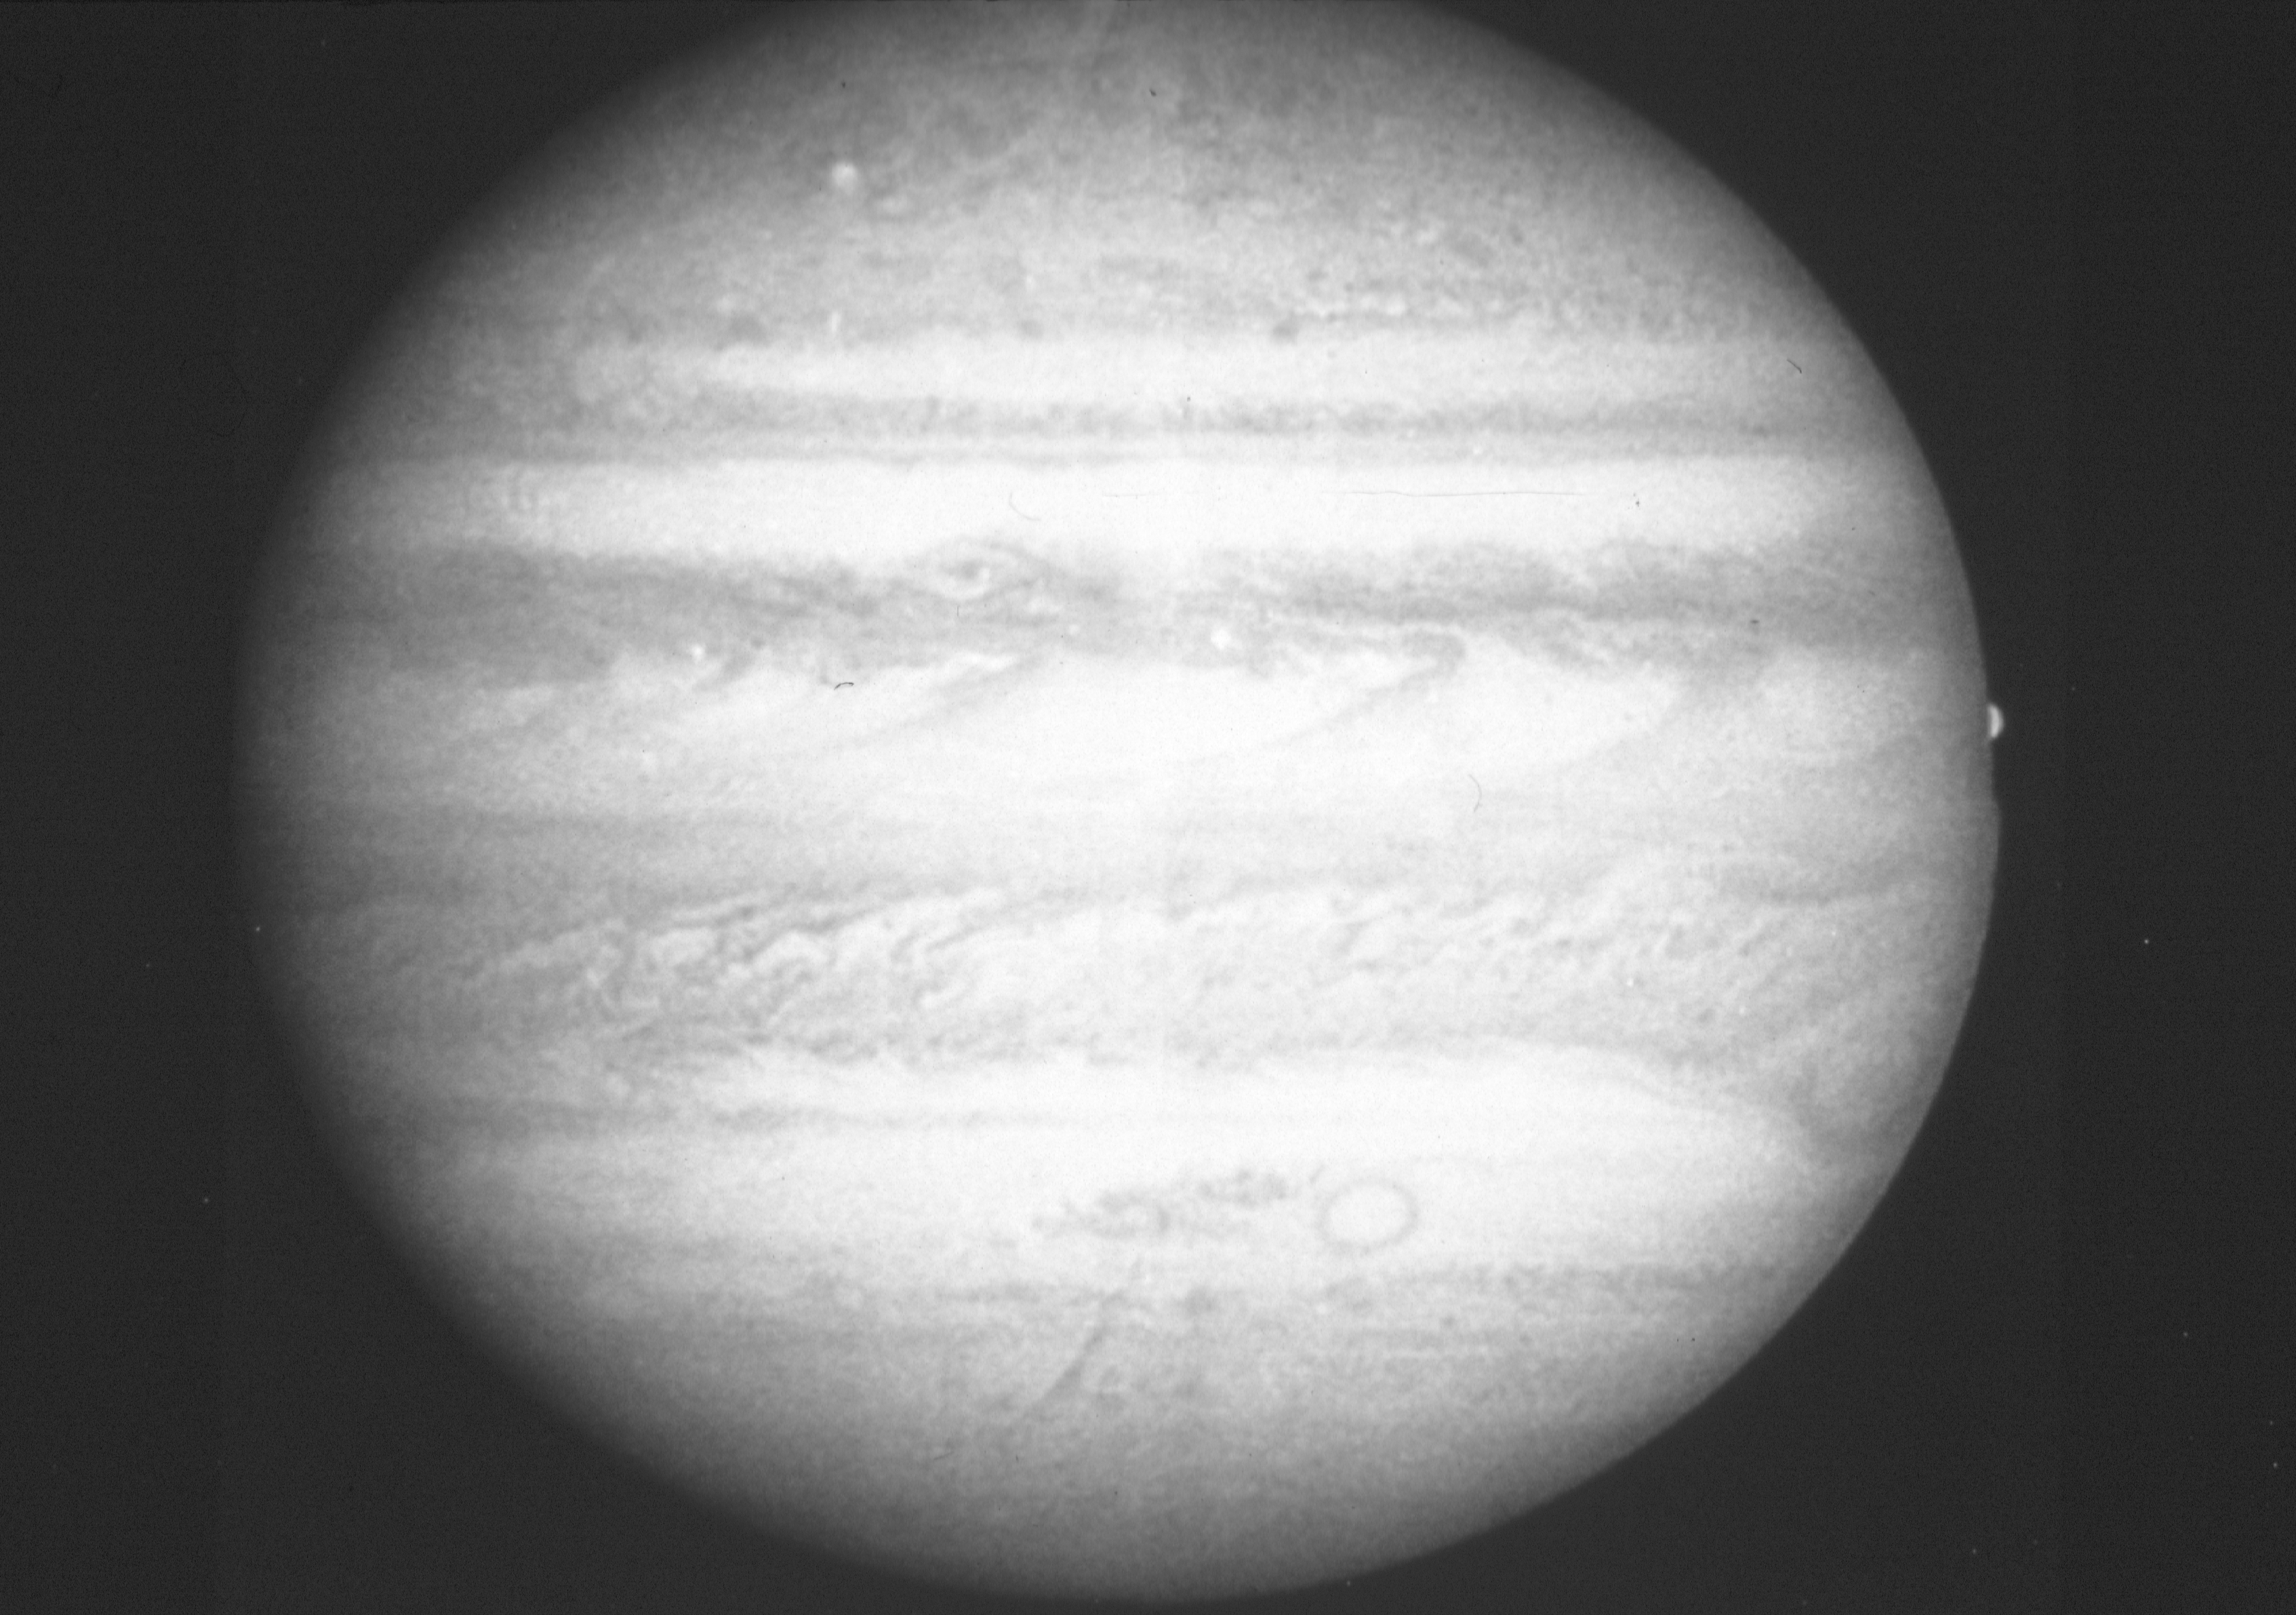

Jupiter

This black and white picture of Jupiter, taken in green light at 1:14 a.m. on the 11th March, 1991 by the Planetary Camera on NASA/ESA Hubble Space Telescope, shows a wealth of fine detail in the clouds that cover the planet. The Great Red Spot is seen at the lower right, also on the right near the equator the satellite Europa is disappearing behind the limb of the planet. The dark 'j' shaped clouds along the equator are the result of a pattern of intense jet streams in the Jovian atmosphere. This picture is as sharp as the Voyager pictures taken five days before the closest approach in 1979.

Detailed comparison with the Voyager pictures shows that a totally different cloud structure has formed over the past twelve years. An HST investigator group is planning to collect Jupiter images using the Planetary Camera on a regular basis over the next several years to record the detailed evolution of Jovian weather. These data will be taken in several colours to study the weather at different altitudes in the atmosphere.

Credit: NASA/ESA